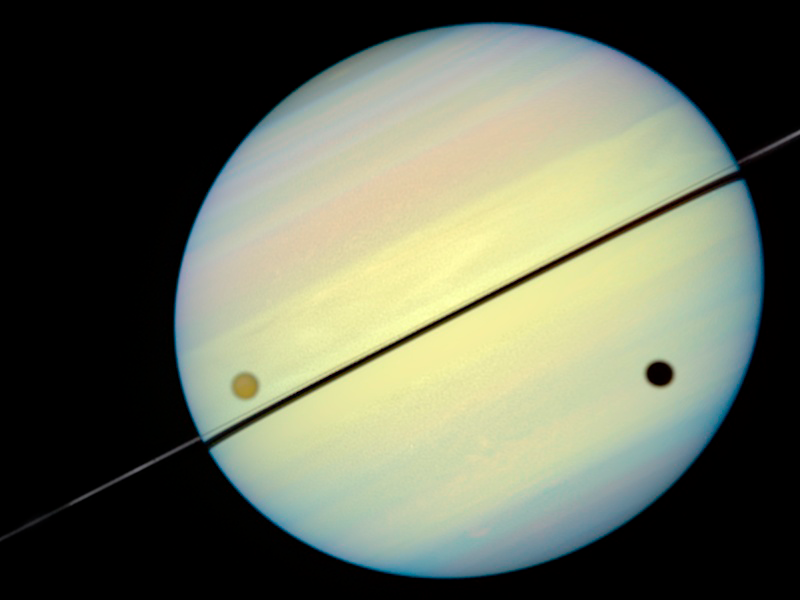

Hubble Catches Titan Chasing Its Shadow - Frame 4

This movie still shows Titan chasing its shadow across Saturn's disk. The still is from a movie created from images taken by NASA/ESA Hubble Space Telescope. It reveals the planet's rings tilted nearly edge-on toward the Earth, an event that occurs once every 15 years.

Credit: NASA/ESA and E. Karkoschka (University of Arizona)